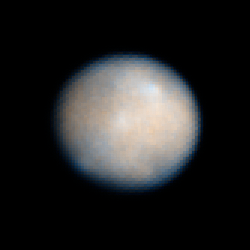

Ceres: 24 January 2004 00:15 UT

Observations of Ceres, the largest known asteroid, have revealed that the object may be a "mini planet," and may contain large amounts of pure water ice beneath its surface.

Credit: NASA, ESA, J. Parker (Southwest Research Institute), P. Thomas (Cornell University), L. McFadden (University of Maryland, College Park), and M. Mutchler and Z. Levay (STScI)